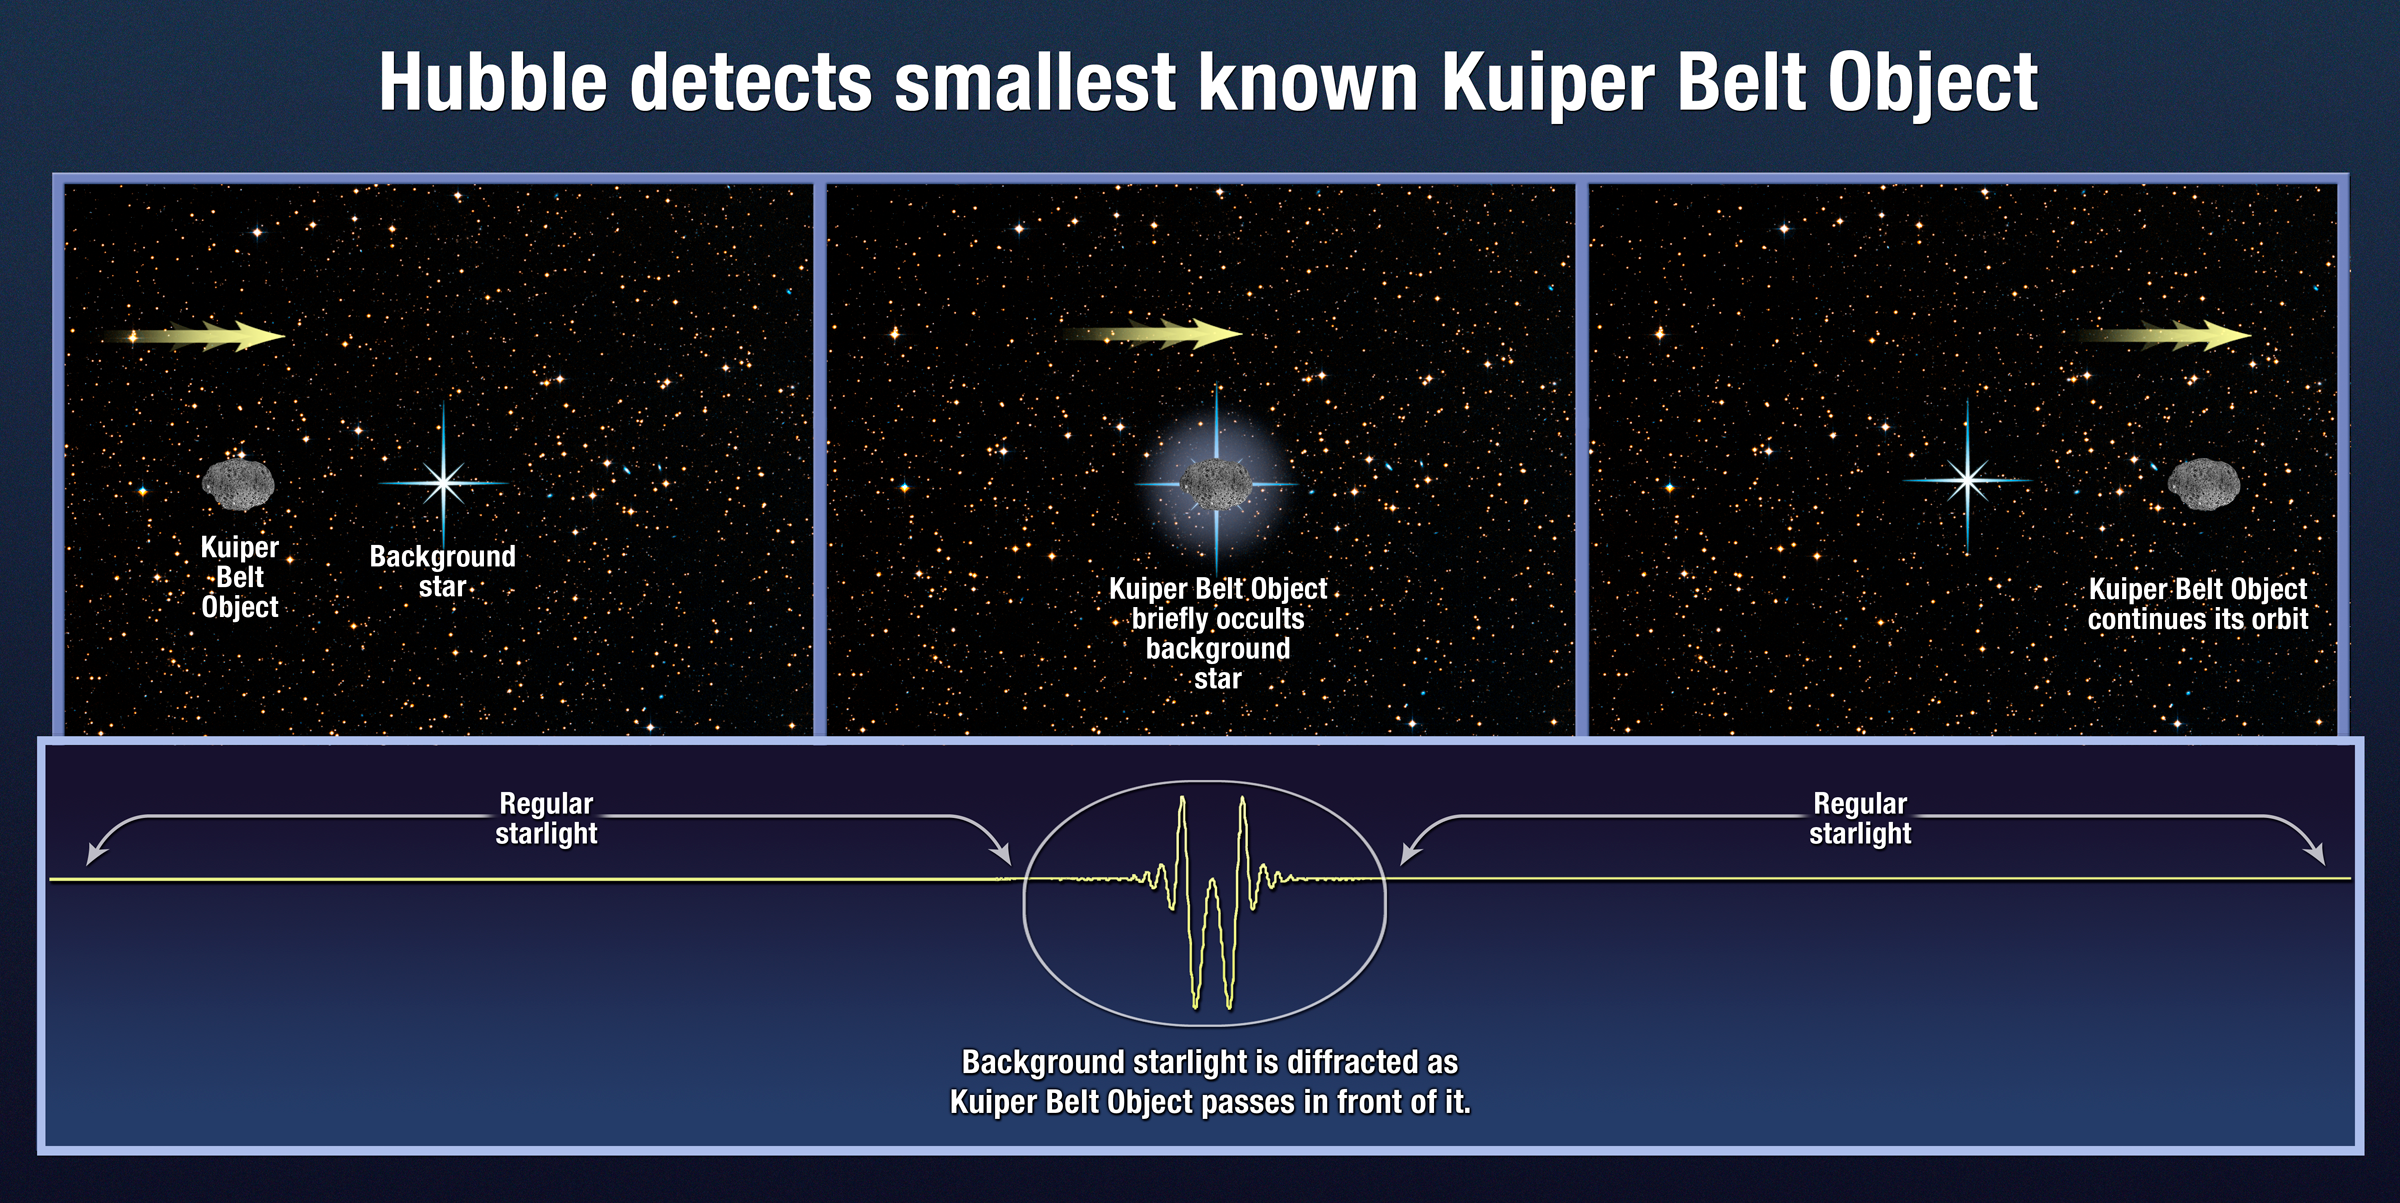

Hubble detects smallest known Kuiper Belt Object

Hubble detects smallest known Kuiper Belt Object.

Credit: NASA, ESA, and A. Feild (STScI)